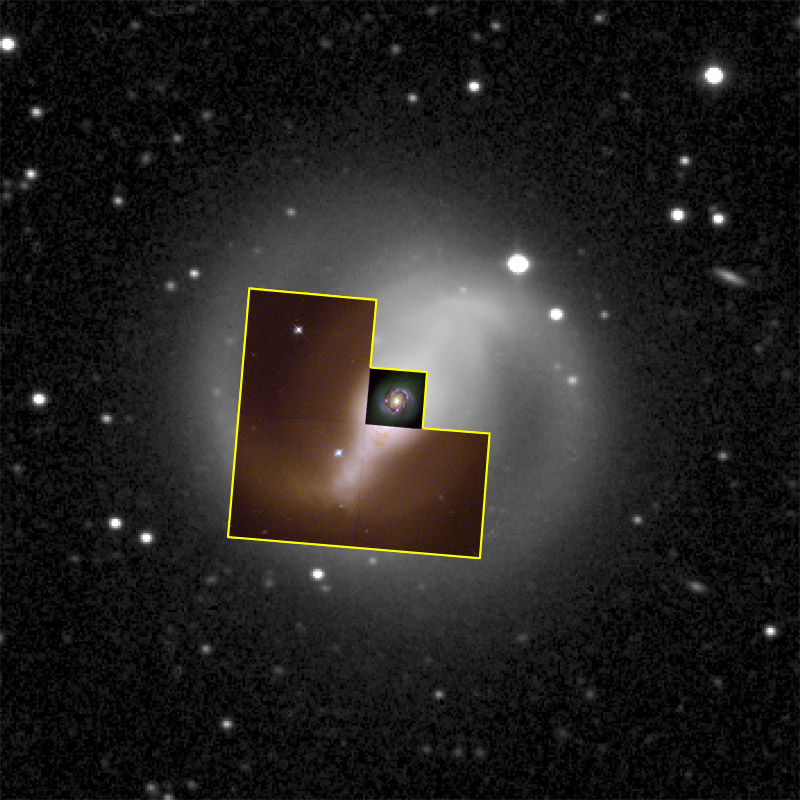

Galaxy NGC 4314 (Hubble and Ground-Based View)

The two spiral arms outside the ring are probably unrelated to the dust lanes, and seem to contain very little dust or gas. The stars in these spiral arms are bluer than most of the galaxy, indicating that many of them are relatively young, less than 200 million years old. However, they are older than those in the ring. This information suggests that the neighborhood of star formation is moving closer to the galaxy's core. Another interpretation has the arms formed through the gravitational interaction of the embedded bar and ring of stars, causing them to spray outward.

Credit: G. Fritz Benedict, Andrew Howell, Inger Jorgensen, David Chapell (University of Texas), Jeffery Kenney (Yale University), and Beverly J. Smith (CASA, University of Colorado), NASA/ESA and McDonald Observatory